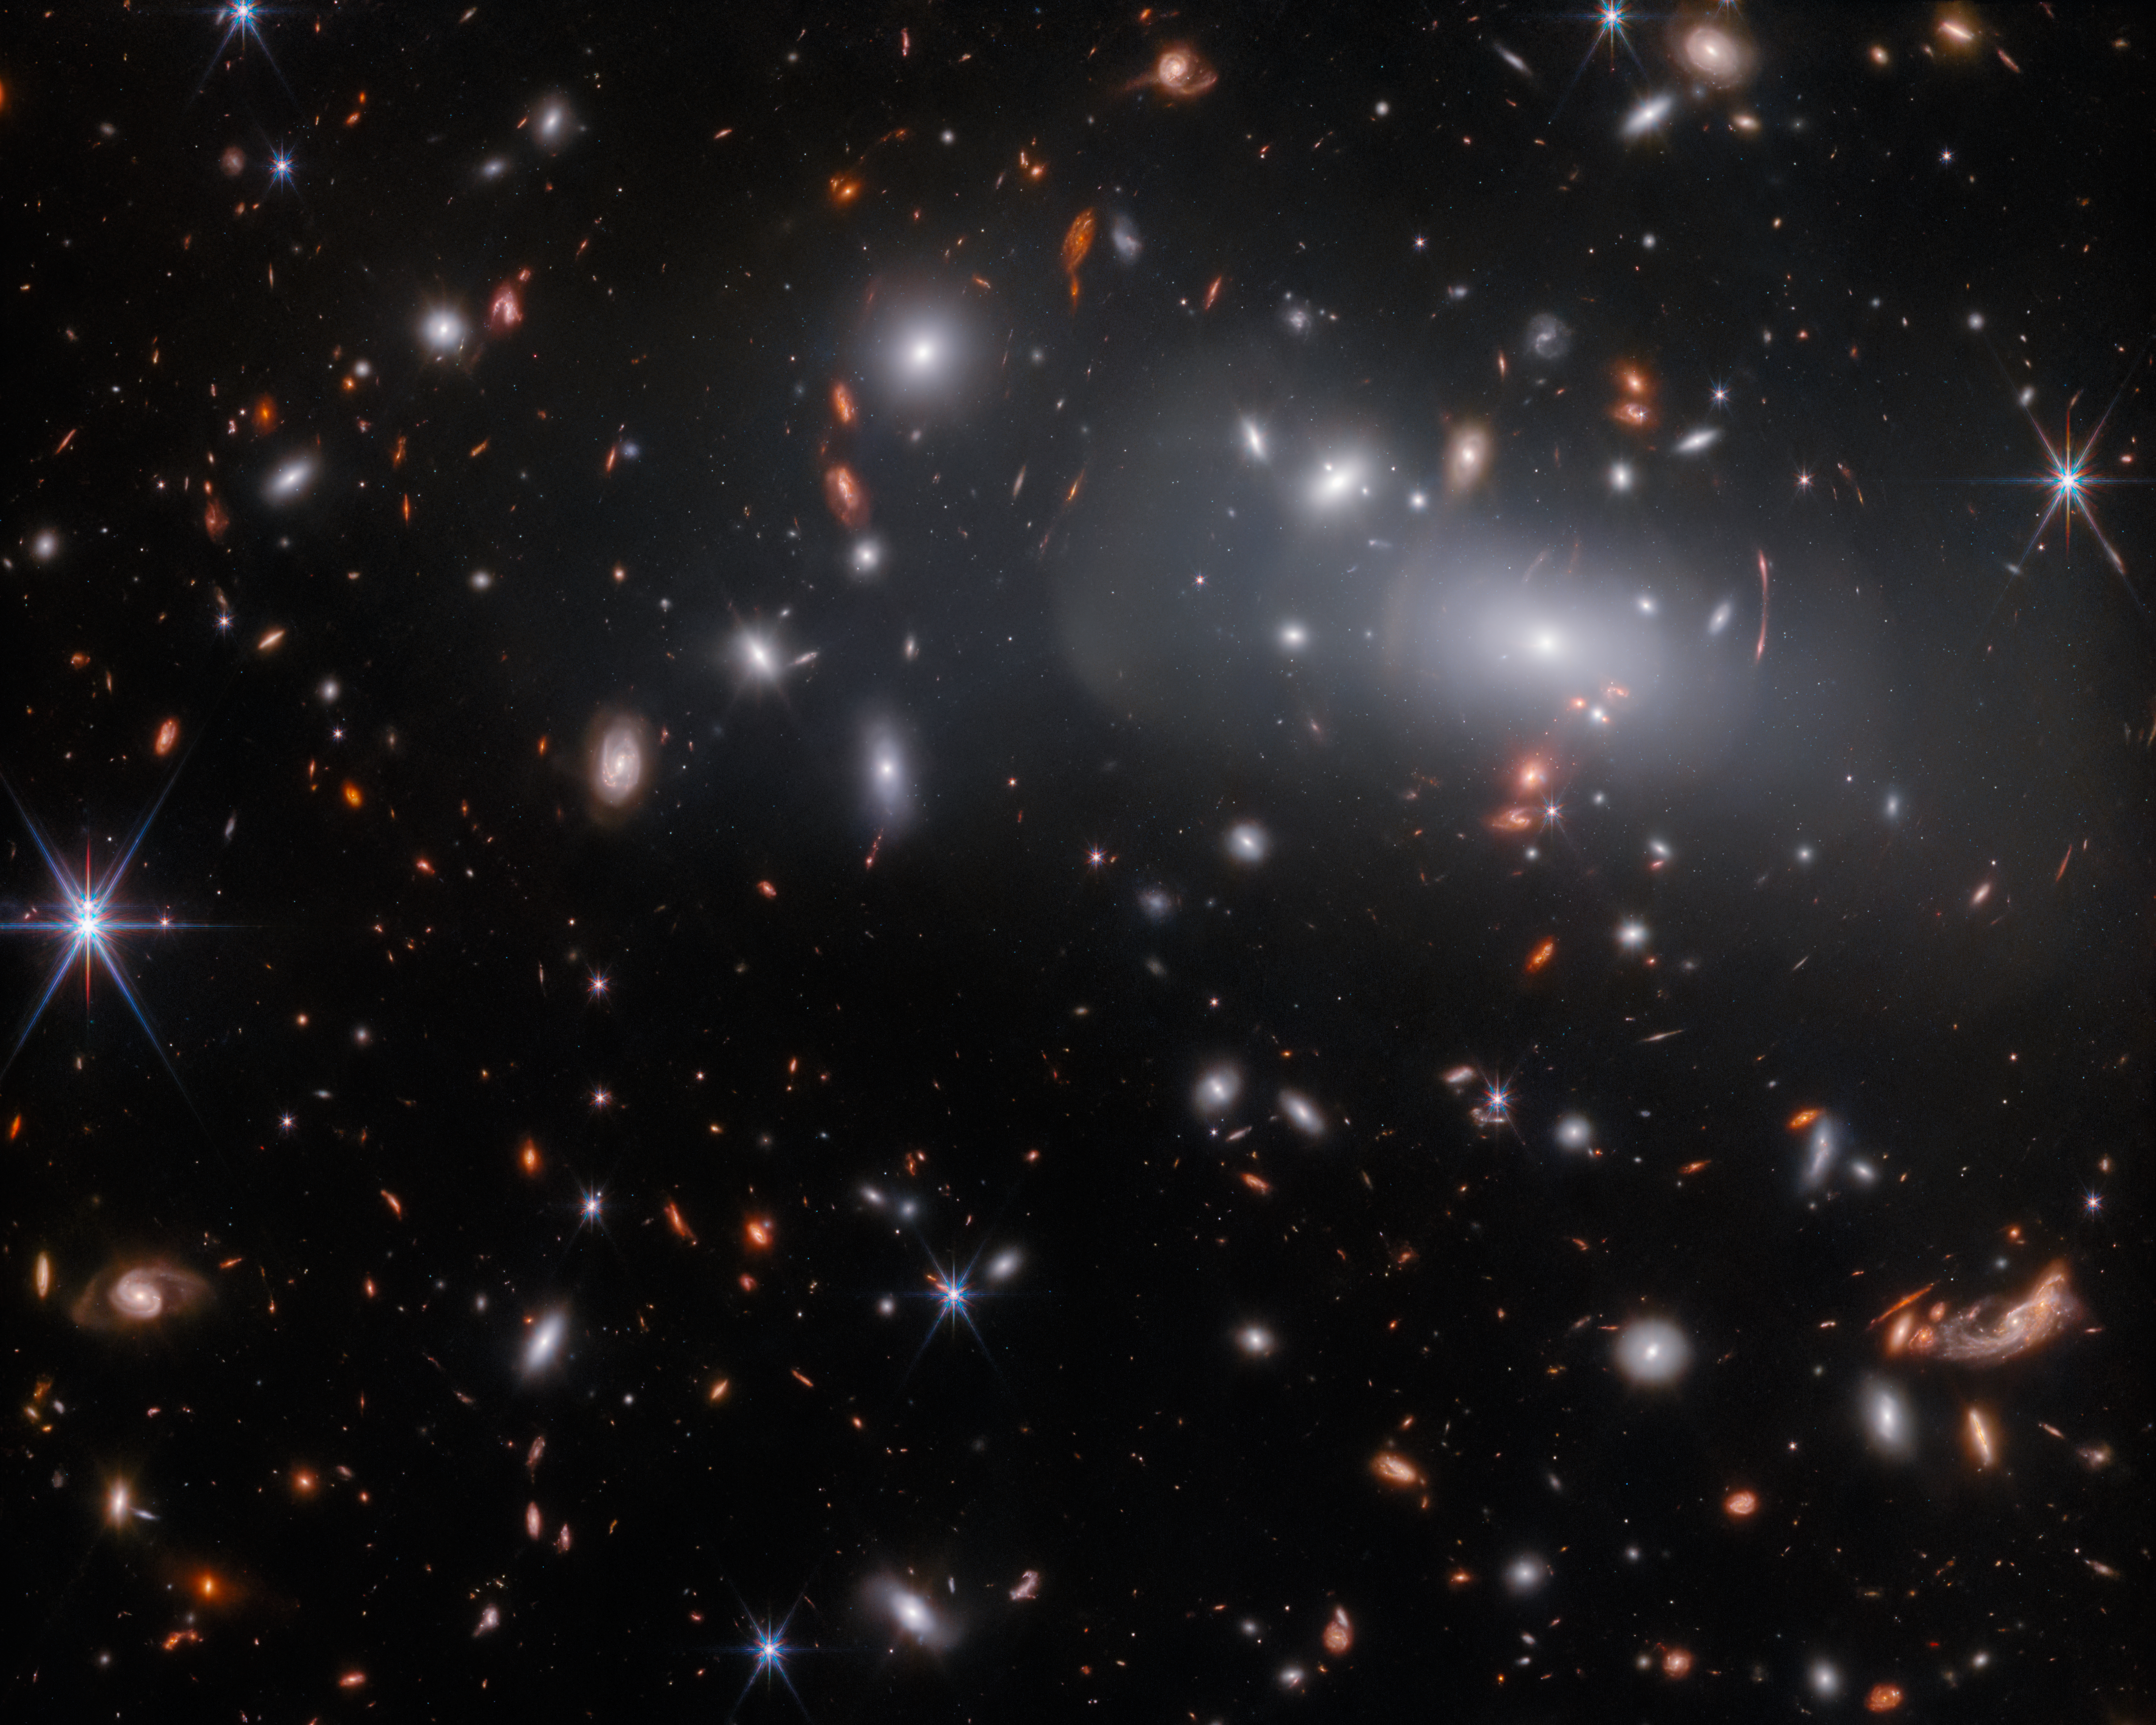

Seeing Triple

This observation from the NASA/ESA/CSA James Webb Space Telescope features the massive galaxy cluster RX J2129. Due to Gravitational lensing, this observation contains three different images of the same supernova-hosting galaxy, which you can see in closer detail here. Gravitational lensing occurs when a massive celestial body causes a sufficient curvature of spacetime to bend the path of light travelling past or through it, almost like a vast lens. In this case, the lens is the galaxy cluster RX J2129, located around 3.2 billion light-years from Earth in the constellation Aquarius. Gravitational lensing can cause background objects to appear strangely distorted, as can be seen by the concentric arcs of light in the upper right of this image.

Astronomers discovered the supernova in the triply-lensed background galaxy using observations from the NASA/ESA Hubble Space Telescope, and they suspected that they had found a very distant Type Ia supernova. These supernovae always produce a fairly consistent luminosity — at the same distance, one looks as bright as any other — which makes them particularly helpful to astronomers. As their distance from Earth is proportional to how dim they appear in the night sky, objects with known brightness can be used as 'standard candles' to measure astronomical distances.

The almost uniform luminosity of a Type Ia supernova could also allow astronomers to understand how strongly the galaxy cluster RX J2129 is magnifying background objects, and therefore how massive the galaxy cluster is. As well as distorting the images of background objects, gravitational lenses can cause distant objects to appear much brighter than they would otherwise. If the gravitational lens magnifies something with a known brightness, such as a Type Ia supernova, then astronomers can use this to measure the ‘prescription’ of the gravitational lens.

This observation was captured by Webb's Near-InfraRed Camera to measure the brightness of the lensed supernova. As part of the same programme, NIRSpec spectroscopy of the supernova was also obtained, which will allow comparison of this distant supernova to Type Ia supernovae in the nearby Universe. This is an important way to verify that one of astronomers’ tried-and-tested methods of measuring vast distances works as expected.

Credit: ESA/Webb, NASA & CSA, P. Kelly